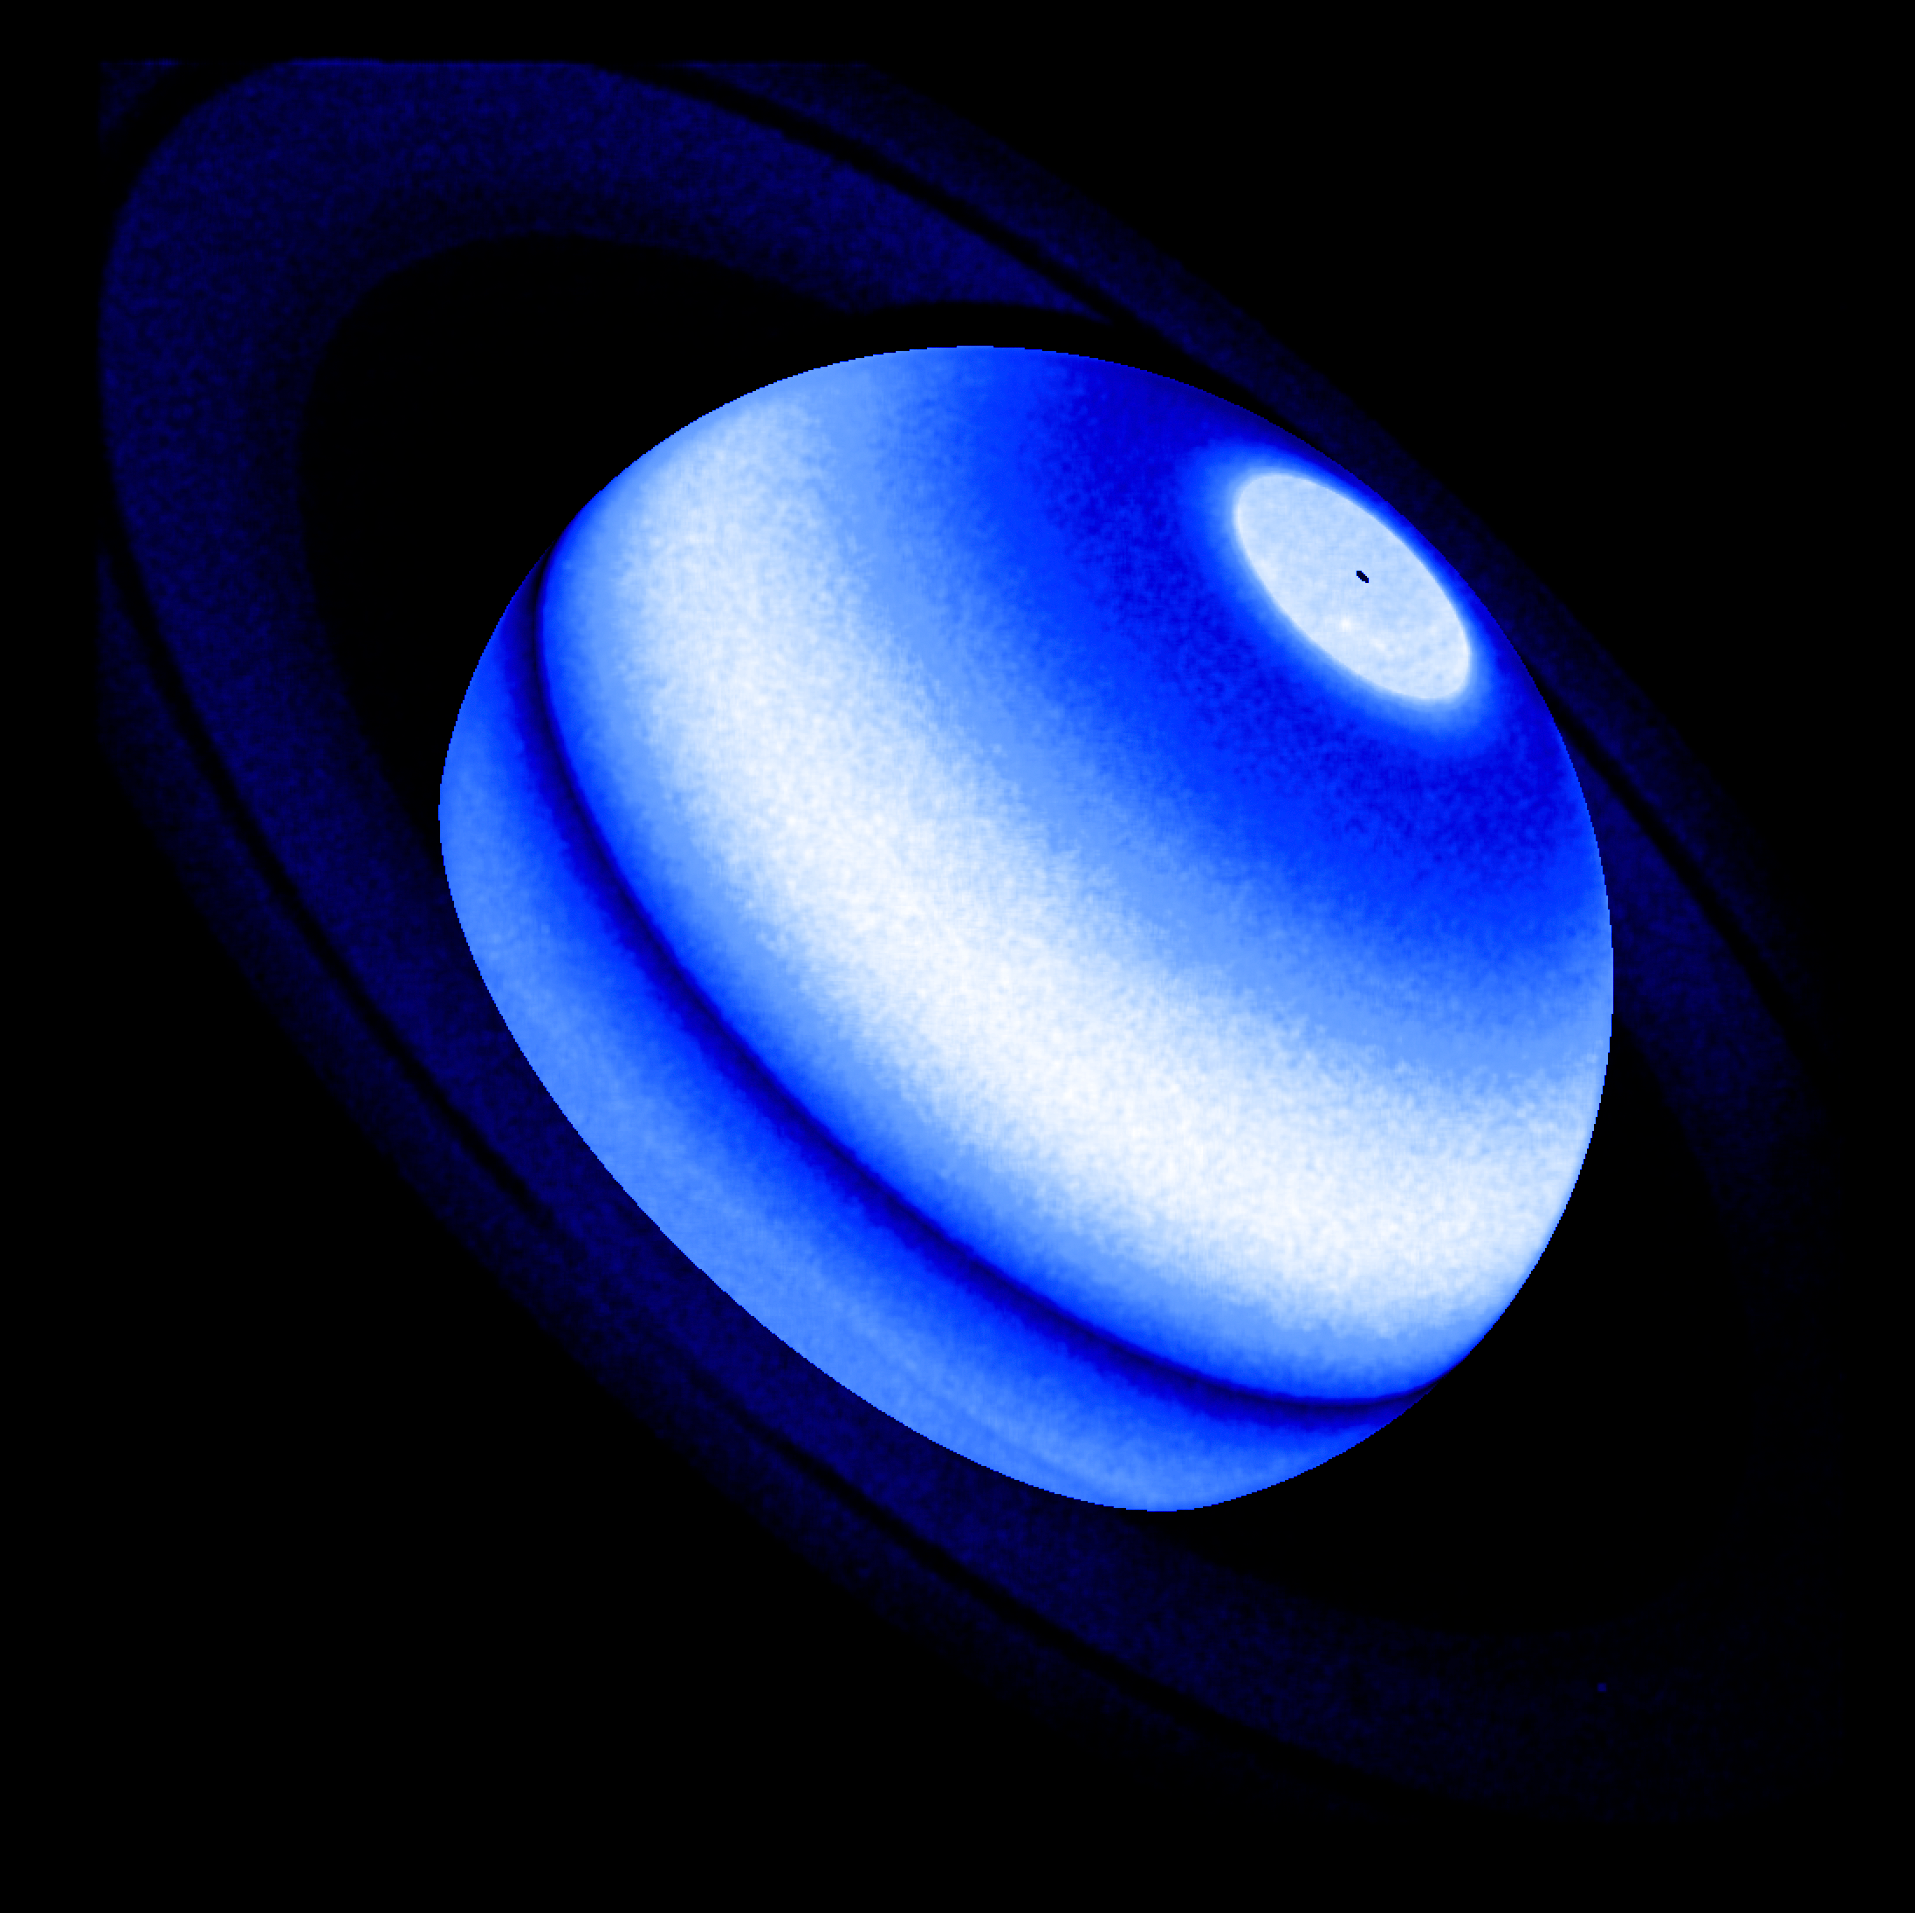

Hubble finds Saturn's rings heating its atmosphere

The planet Saturn is easily recognizable for its opulent ring system that can easily be seen through a small telescope. Astronomers have now found that the rings are not as placid as they look: a rain of icy particles is affecting the giant planet's weather. It took observations of Saturn from the ESA/NASA Hubble Space Telescope and the retired NASA/ESA/ASI Cassini probe, in addition to the Voyager 1 and 2 spacecraft and the retired International Ultraviolet Explorer mission, to pull it all together.

The telltale evidence is an excess of ultraviolet radiation, seen as a spectral line of hot hydrogen in Saturn's atmosphere. The most feasible explanation is heating caused by icy ring particles raining down onto Saturn's atmosphere. This rain could be due to the impact of micrometeorites, solar wind particle bombardment, solar ultraviolet radiation, or electromagnetic forces picking up electrically charged dust.

A new study pulled together archival ultraviolet-light (UV) observations from four space missions that studied Saturn. This included observations from the two Voyager probes that flew by Saturn in the 1980s and measured the UV excess — at the time, astronomers dismissed the measurements as noise in the detectors. The Cassini mission, which arrived at Saturn in 2004, also collected UV data on the atmosphere over several years, and additional data came from the International Ultraviolet Explorer, launched in 1978, and from Hubble.

But the lingering question was whether all the data could be illusory, or instead reflected a true phenomenon on Saturn. The key to assembling the jigsaw puzzle came in the decision to use measurements from Hubble's Space Telescope Imaging Spectrograph (STIS). Its precision observations of Saturn were used to calibrate the archival UV data from all four other space missions. Four decades of UV data cover multiple solar cycles and help astronomers study the Sun's seasonal effects on Saturn.

By bringing all the diverse data together and calibrating it, it was determined that there is no seasonal difference to the level of UV radiation. The unexpected interaction between the rings and the upper atmosphere is now being investigated in depth, to define new diagnostic tools for estimating if distant exoplanets have extended, Saturn-like ring systems.

These results are featured in the paper published on 30 March 2023 in the Planetary Science Journal.

Credit: ESA/Hubble, NASA & L. Ben-Jaffel